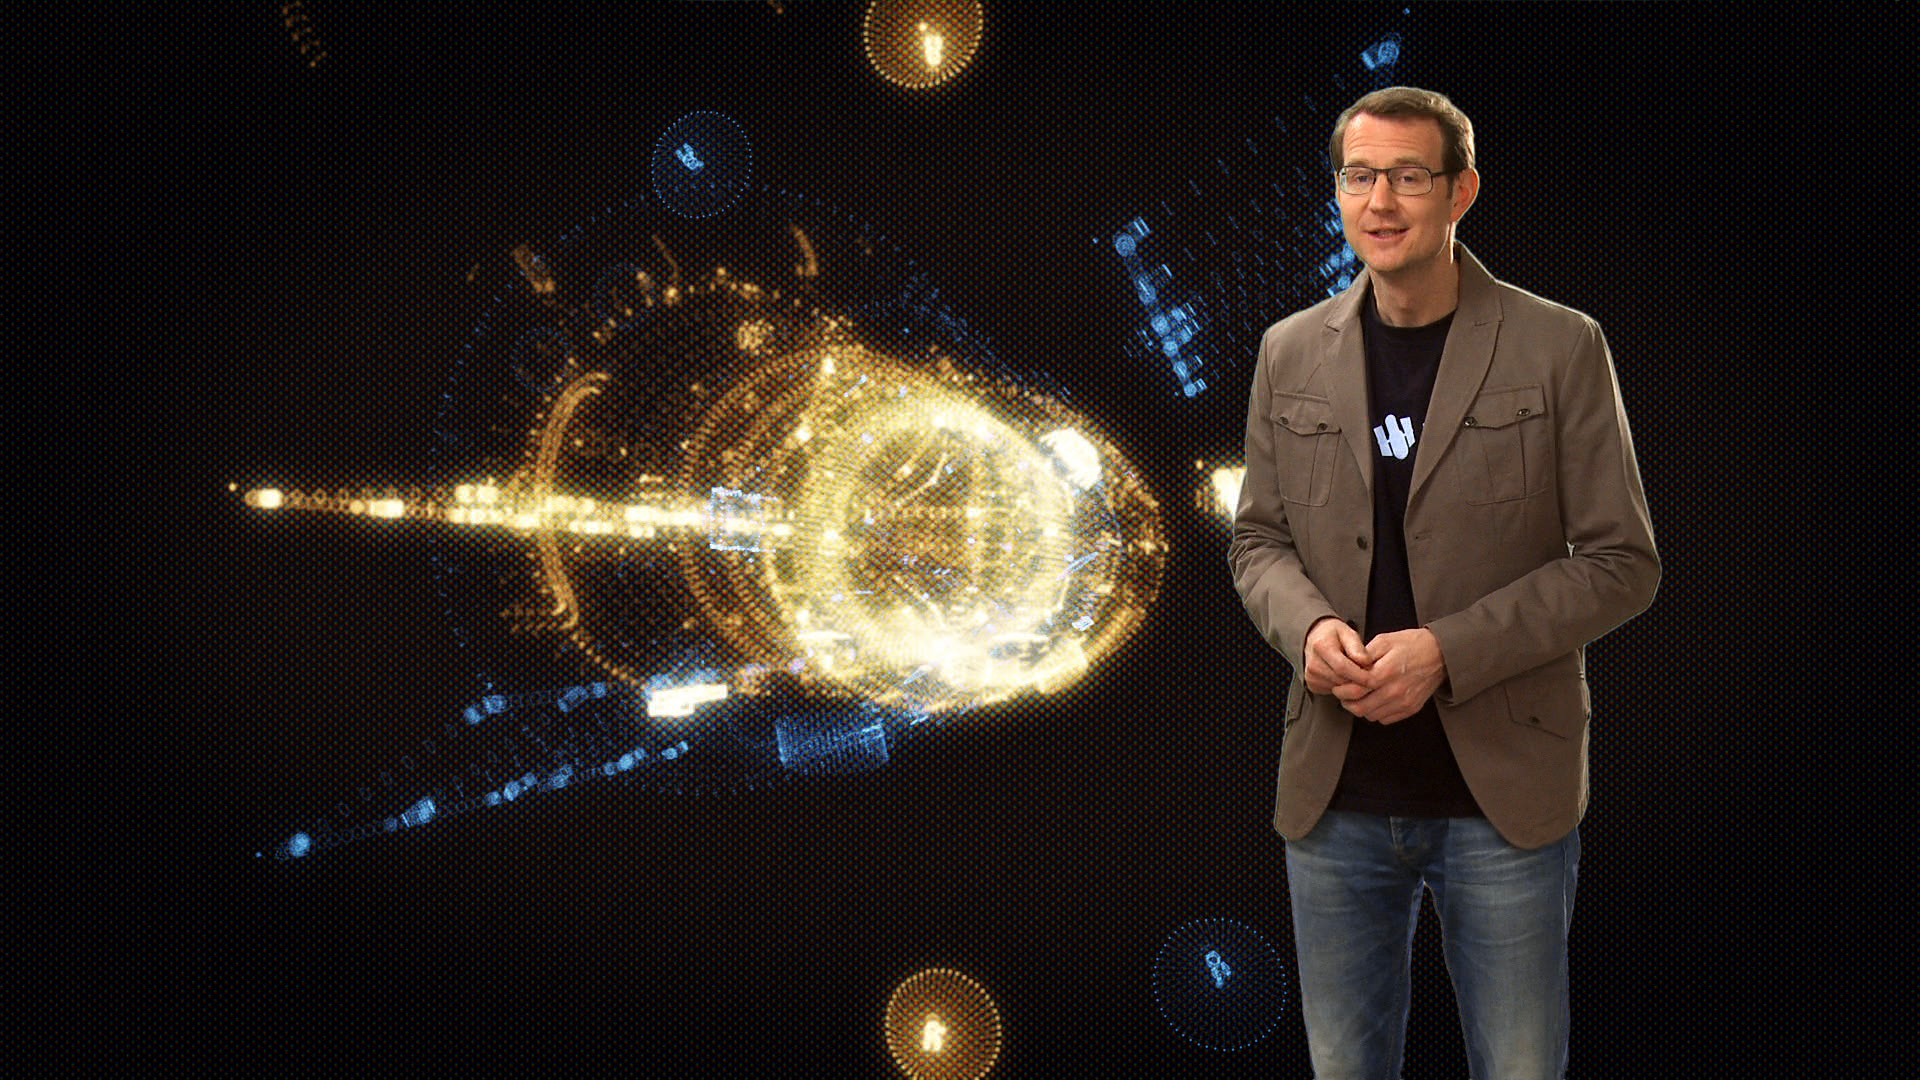

Screenshot of Hubblecast 65

Hubblecast 65 can be downloaded in a range of formats including HD here

Credit: NASA & ESA